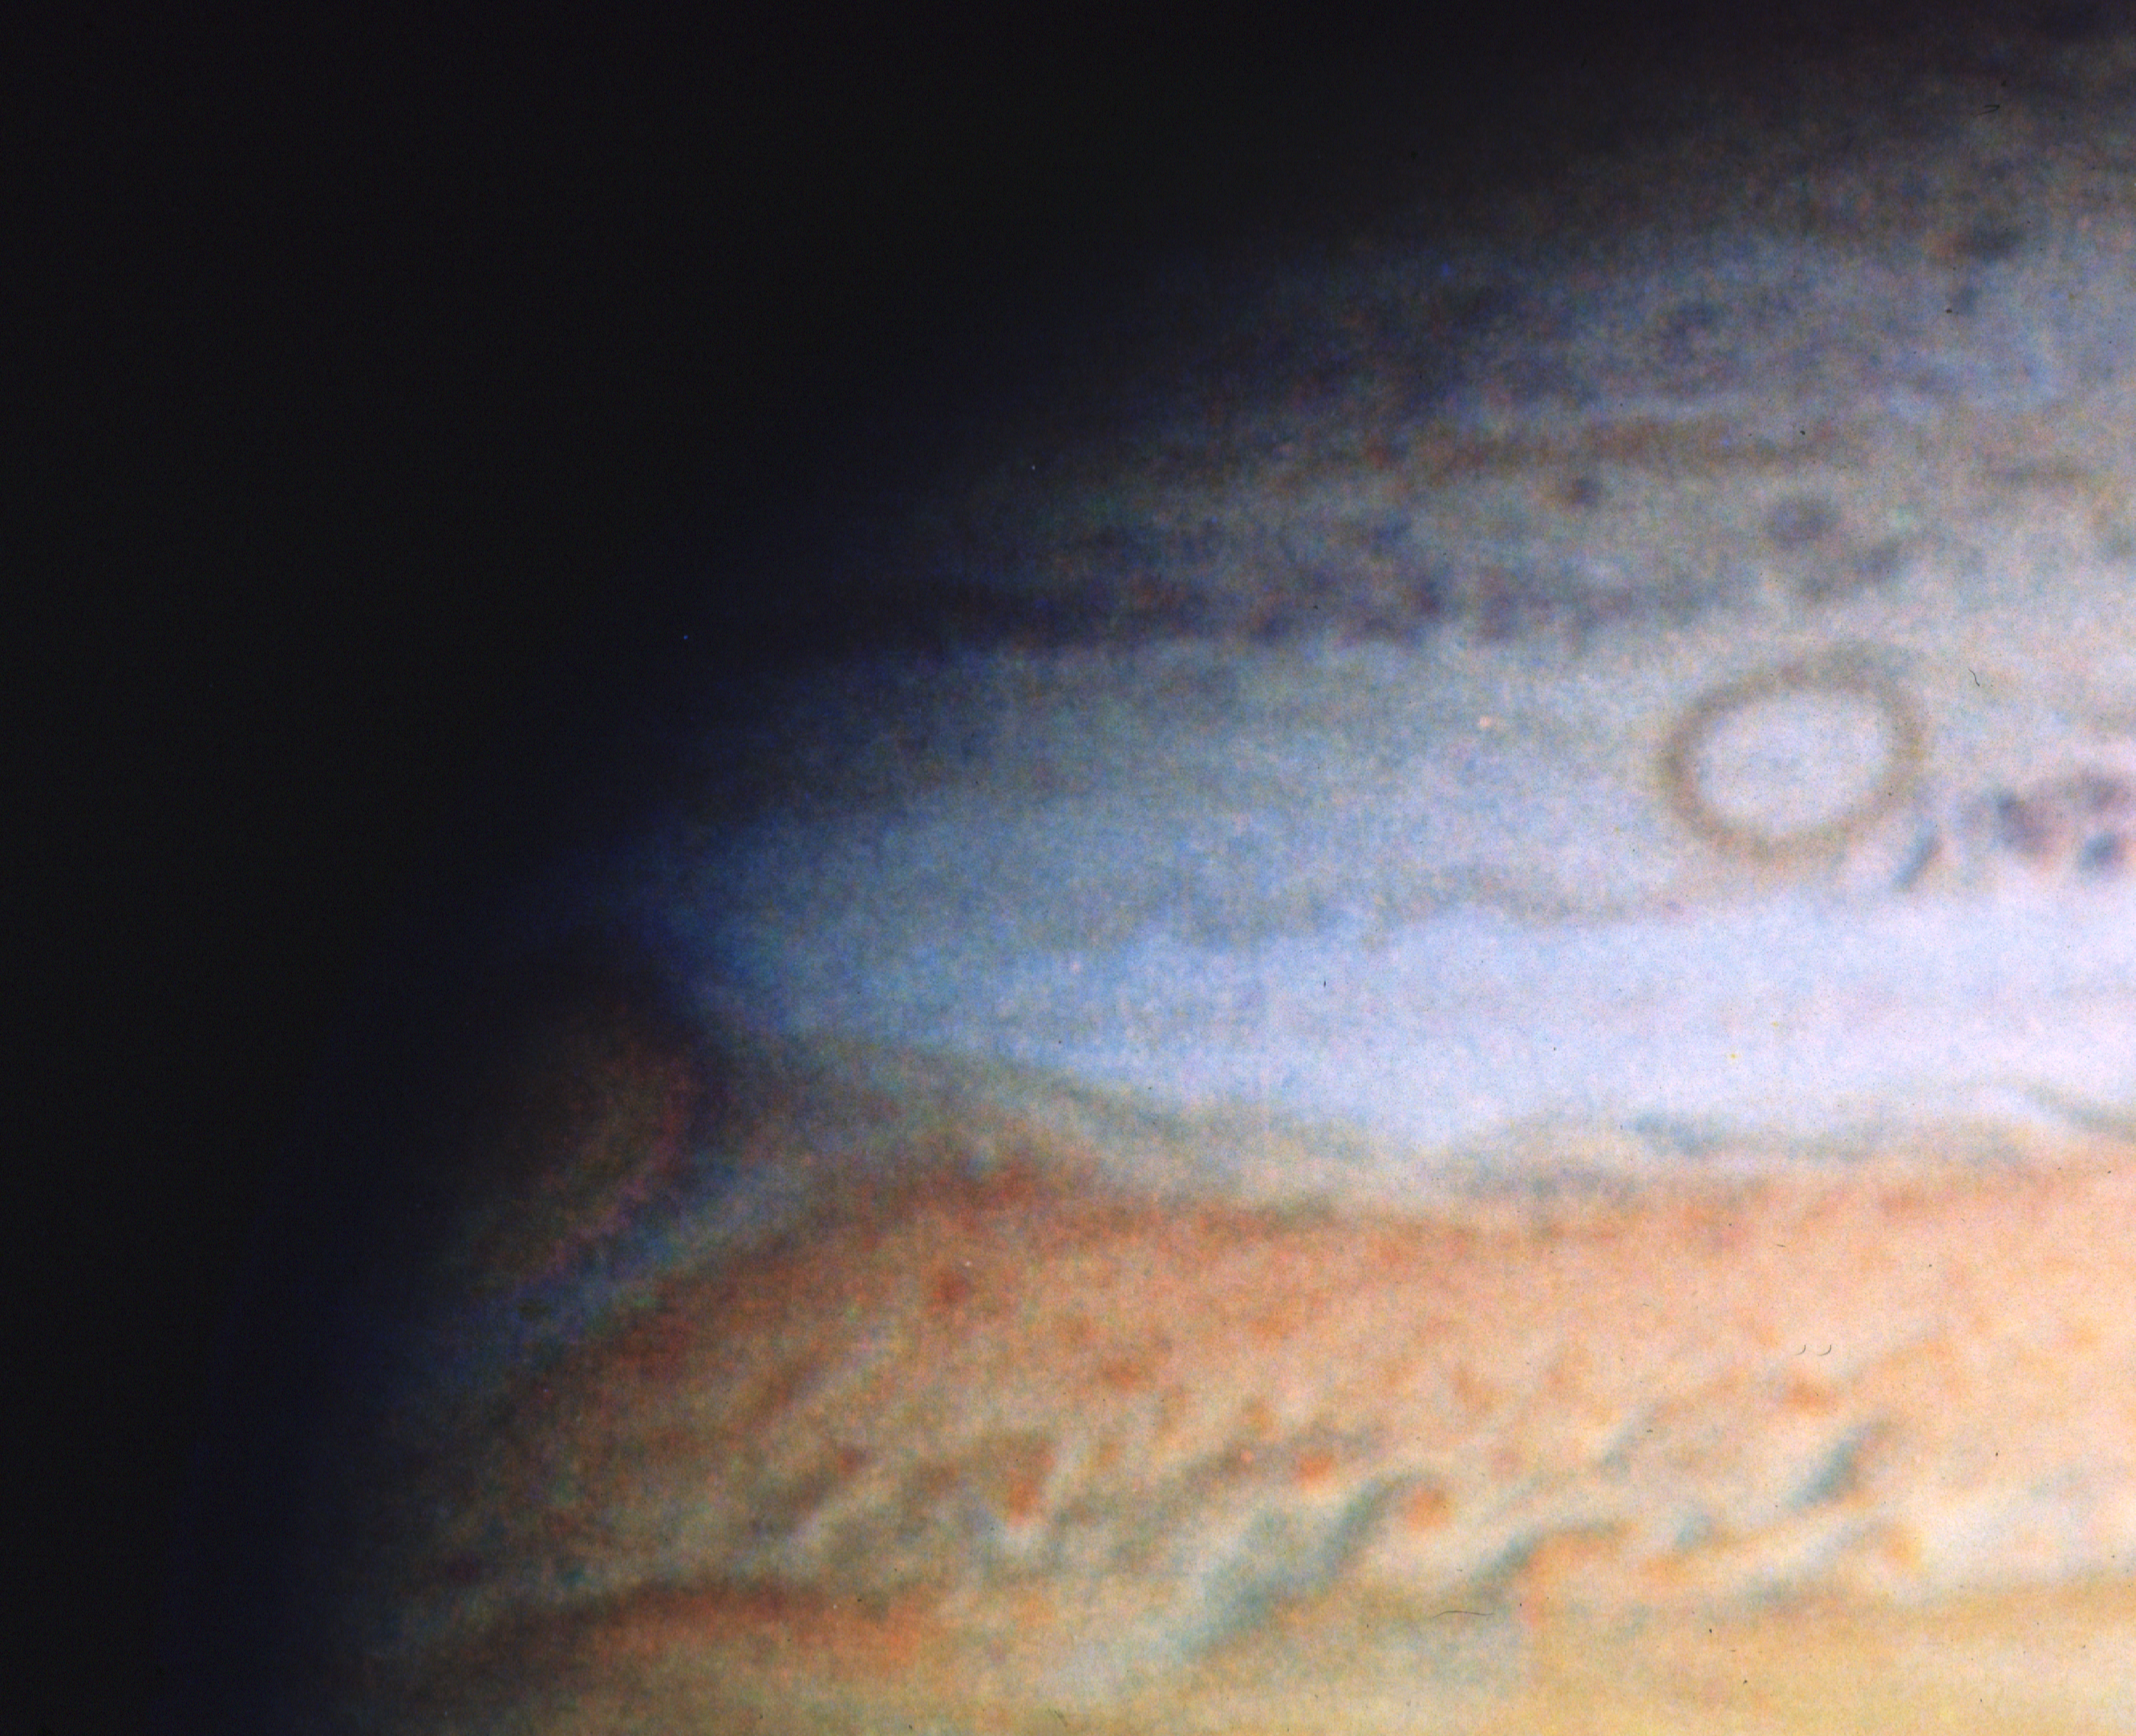

HST's first observation of Jupiter

On March 11, 1991, the Wide Field/planetary Camera on NASA/ESA Hubble Space Telescope observed Jupiter for the first time. This "true color" picture of the southeast quadrant of the planet shows a striking oval-shaped dark ring on the left and the Great Red Spot just rotating out of view on the right aide. These features are thought to be very large hurricane-like structures where warmer gases carry ammonia ice crystals from deep in the Jovian atmosphere up above the top of the normal cloud layers that shroud Jupiter. Jovian clouds are thought to be colored by small amounts of sulfur, phosphorus and carbon compounds in the ice crystals. This picture has about the same resolution (0.15 arcsec) as voyager pictures taken 5 days before encounter in 1979 . This will allow a continuation of the study of Jovian wind velocities begun by voyager and allow expansion of this program into the ultraviolet and infrared where clouds form at different heights in the atmosphere.

The blue and blue-green bands to the right of the edge of Jupiter are artifacts due to the rotation of the planet during the six minutes between the separate blue, green and red exposures used to make the colour picture.

Credit: NASA/ESA